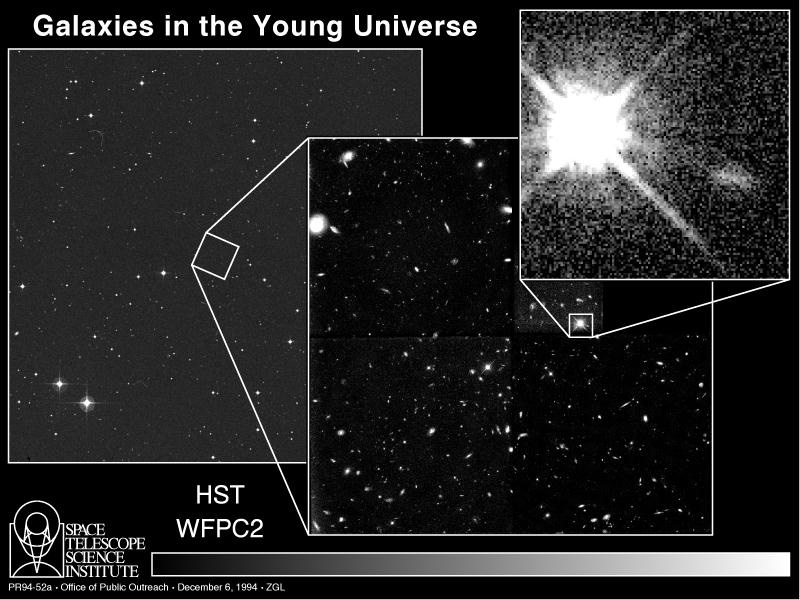

Galaxies in the young Universe

[left]
This image of a small region of the constellation Sculptor, taken with a ground-based photographic sky survey camera, illustrates the extremely small angular size of a distant galaxy cluster in the night sky. Though this picture encompasses a piece of the sky about the width of the bowl of the Big Dipper, the cluster is so far away it fills a sky area only 1/10th the diameter of the Full Moon. The cluster members are not visible because they are so much fainter than foreground stars.

[center]
A NASA/ESA Hubble Space Telescope href="http://www.spacetelescope.org/about/index.html">HST) image of the farthest cluster of galaxies in the universe, located at a distance of 12 billion light-years. Because the light from these remote galaxies has taken 12 billion years to reach us, this image is a remarkable glimpse of the primeval universe, at it looked about two billion years after the Big Bang. The clustercontains 14 galaxies, the other objects are largely foreground galaxies. The galaxy cluster lies in front of quasar Q0000-263 in the constellation Sculptor. Presumably the brilliant core of an active galaxy, the quasar provides a beacon for searching for primordial galaxy clusters.

Credit: Duccio Macchetto (ESA/STScI), Mauro Giavalisco (STScI), and NASA